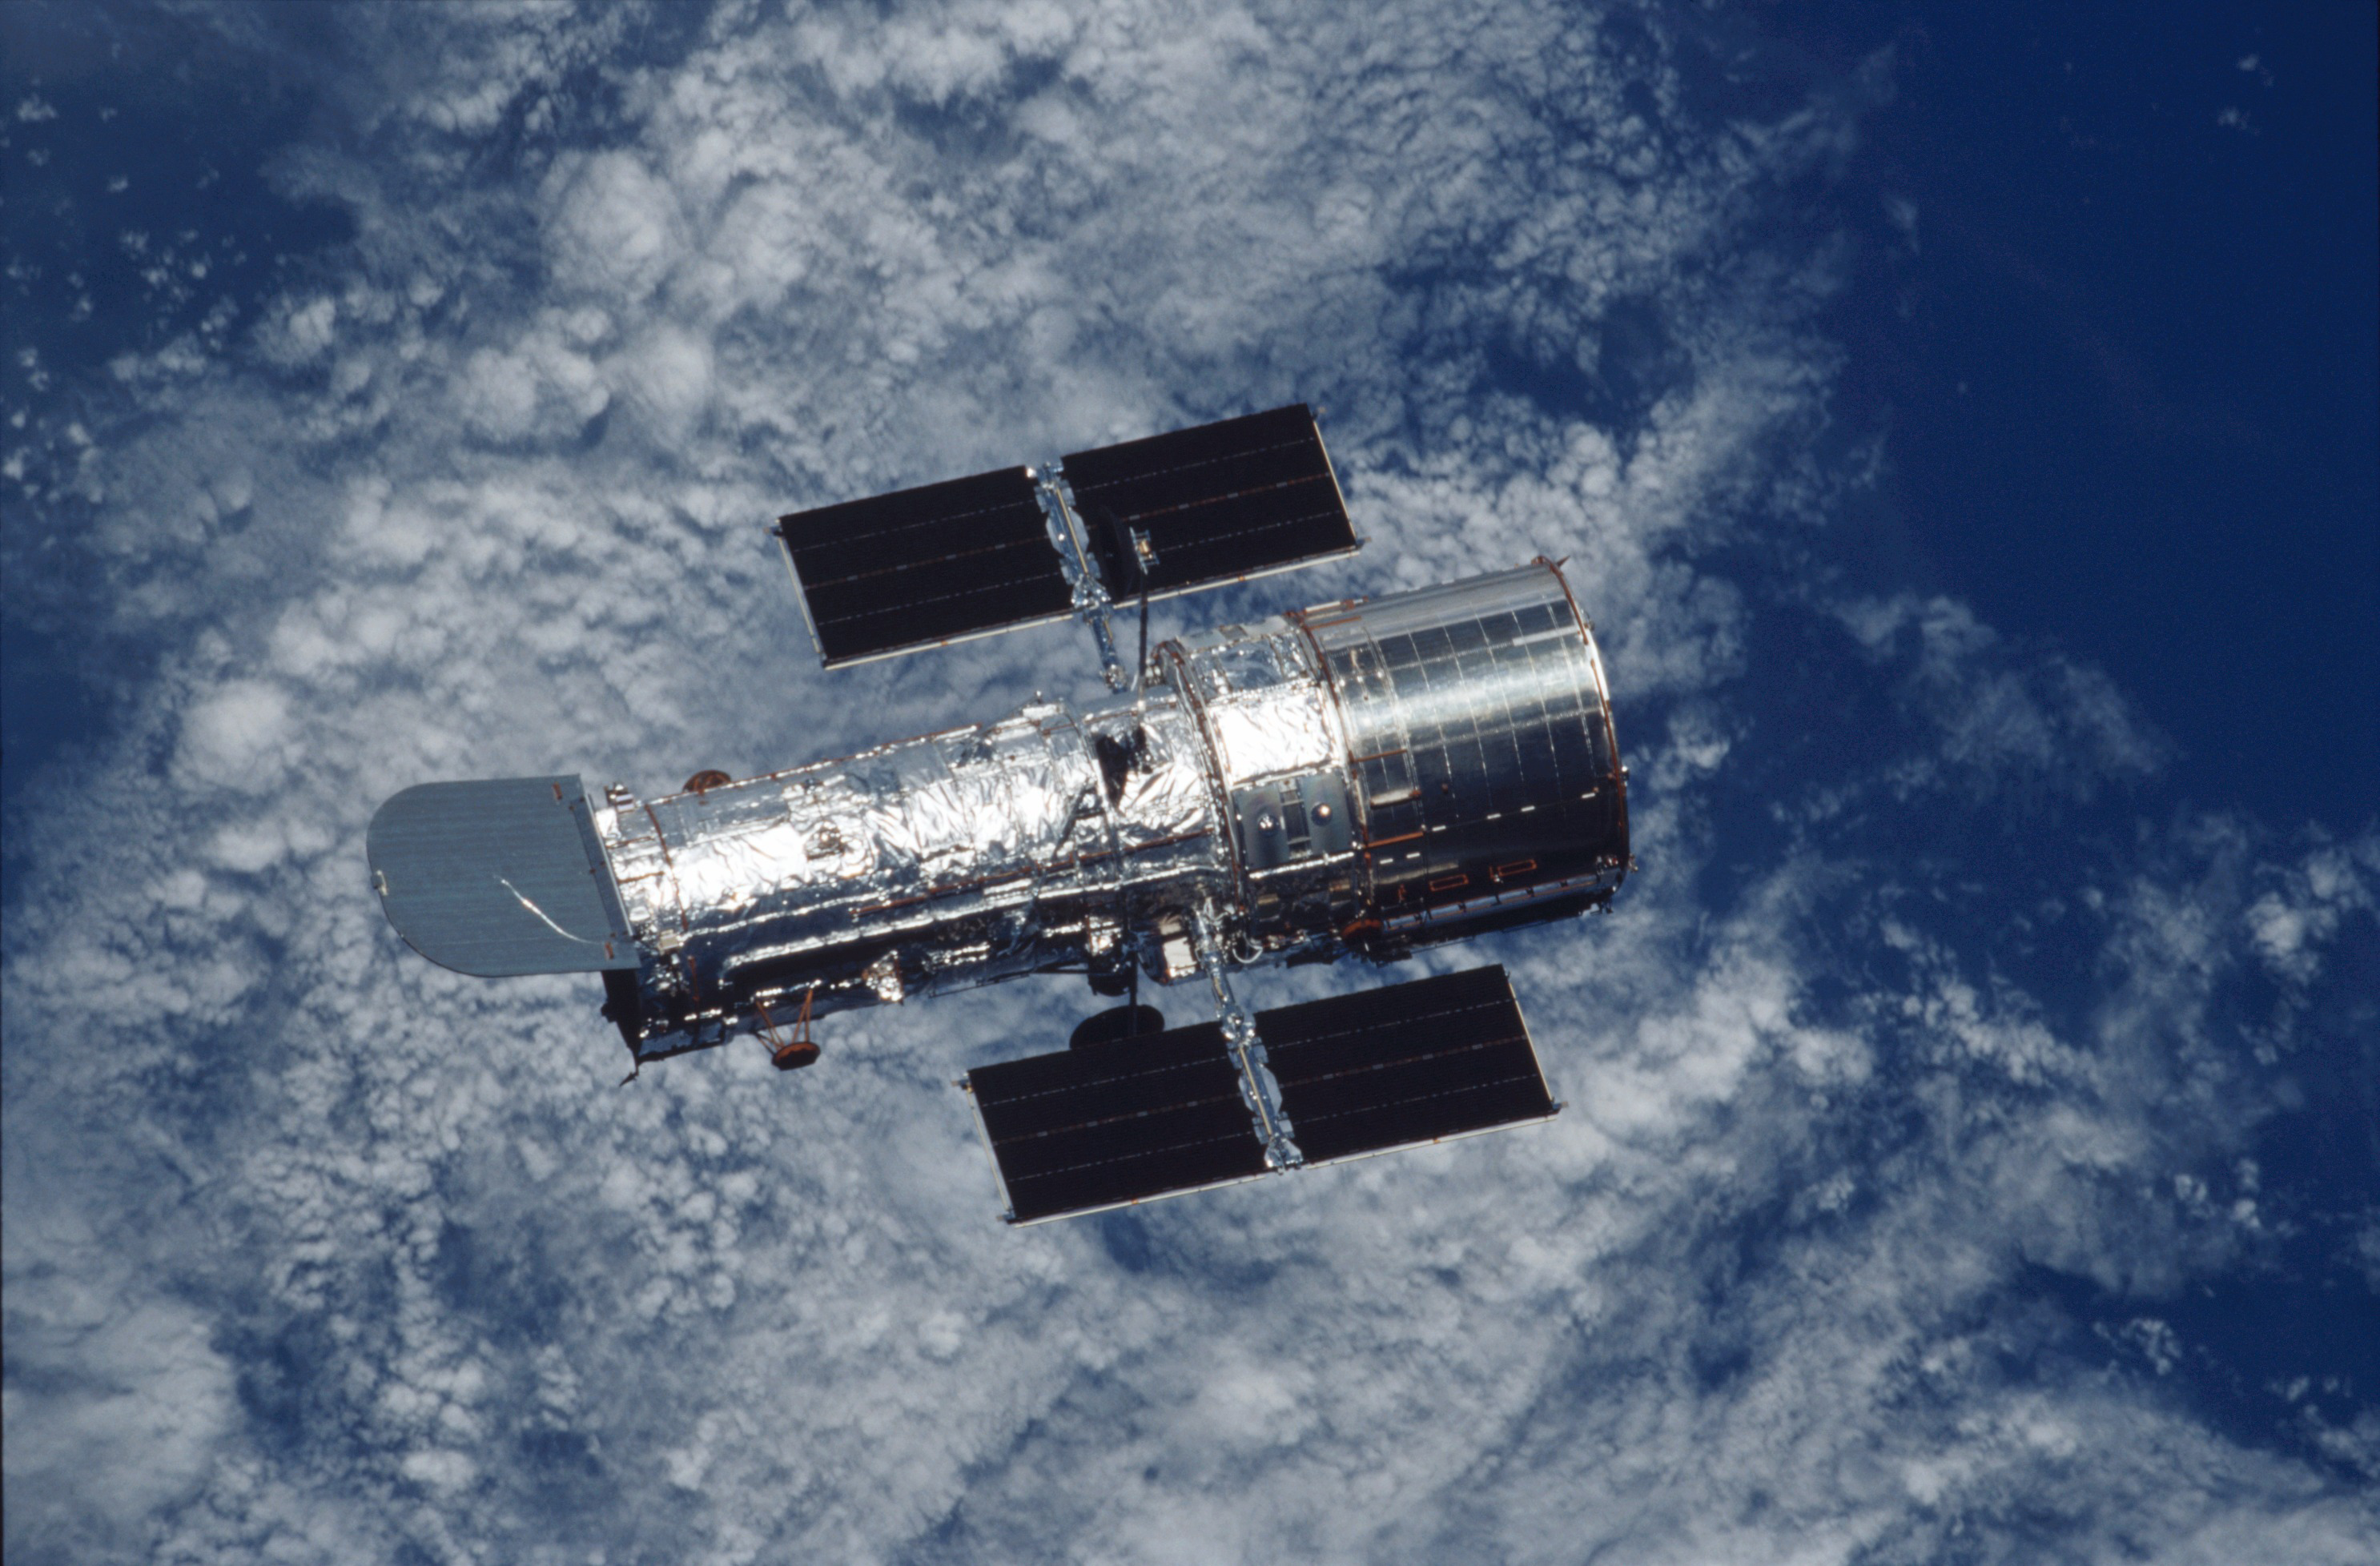

Hubble Space Telescope over Earth

The NASA/ESA Hubble Space Telescope orbiting Earth. The picture was taken from astronauts on board the space shuttle Columbia after the Servicing Mission 3B.

Credit: NASA/ESA